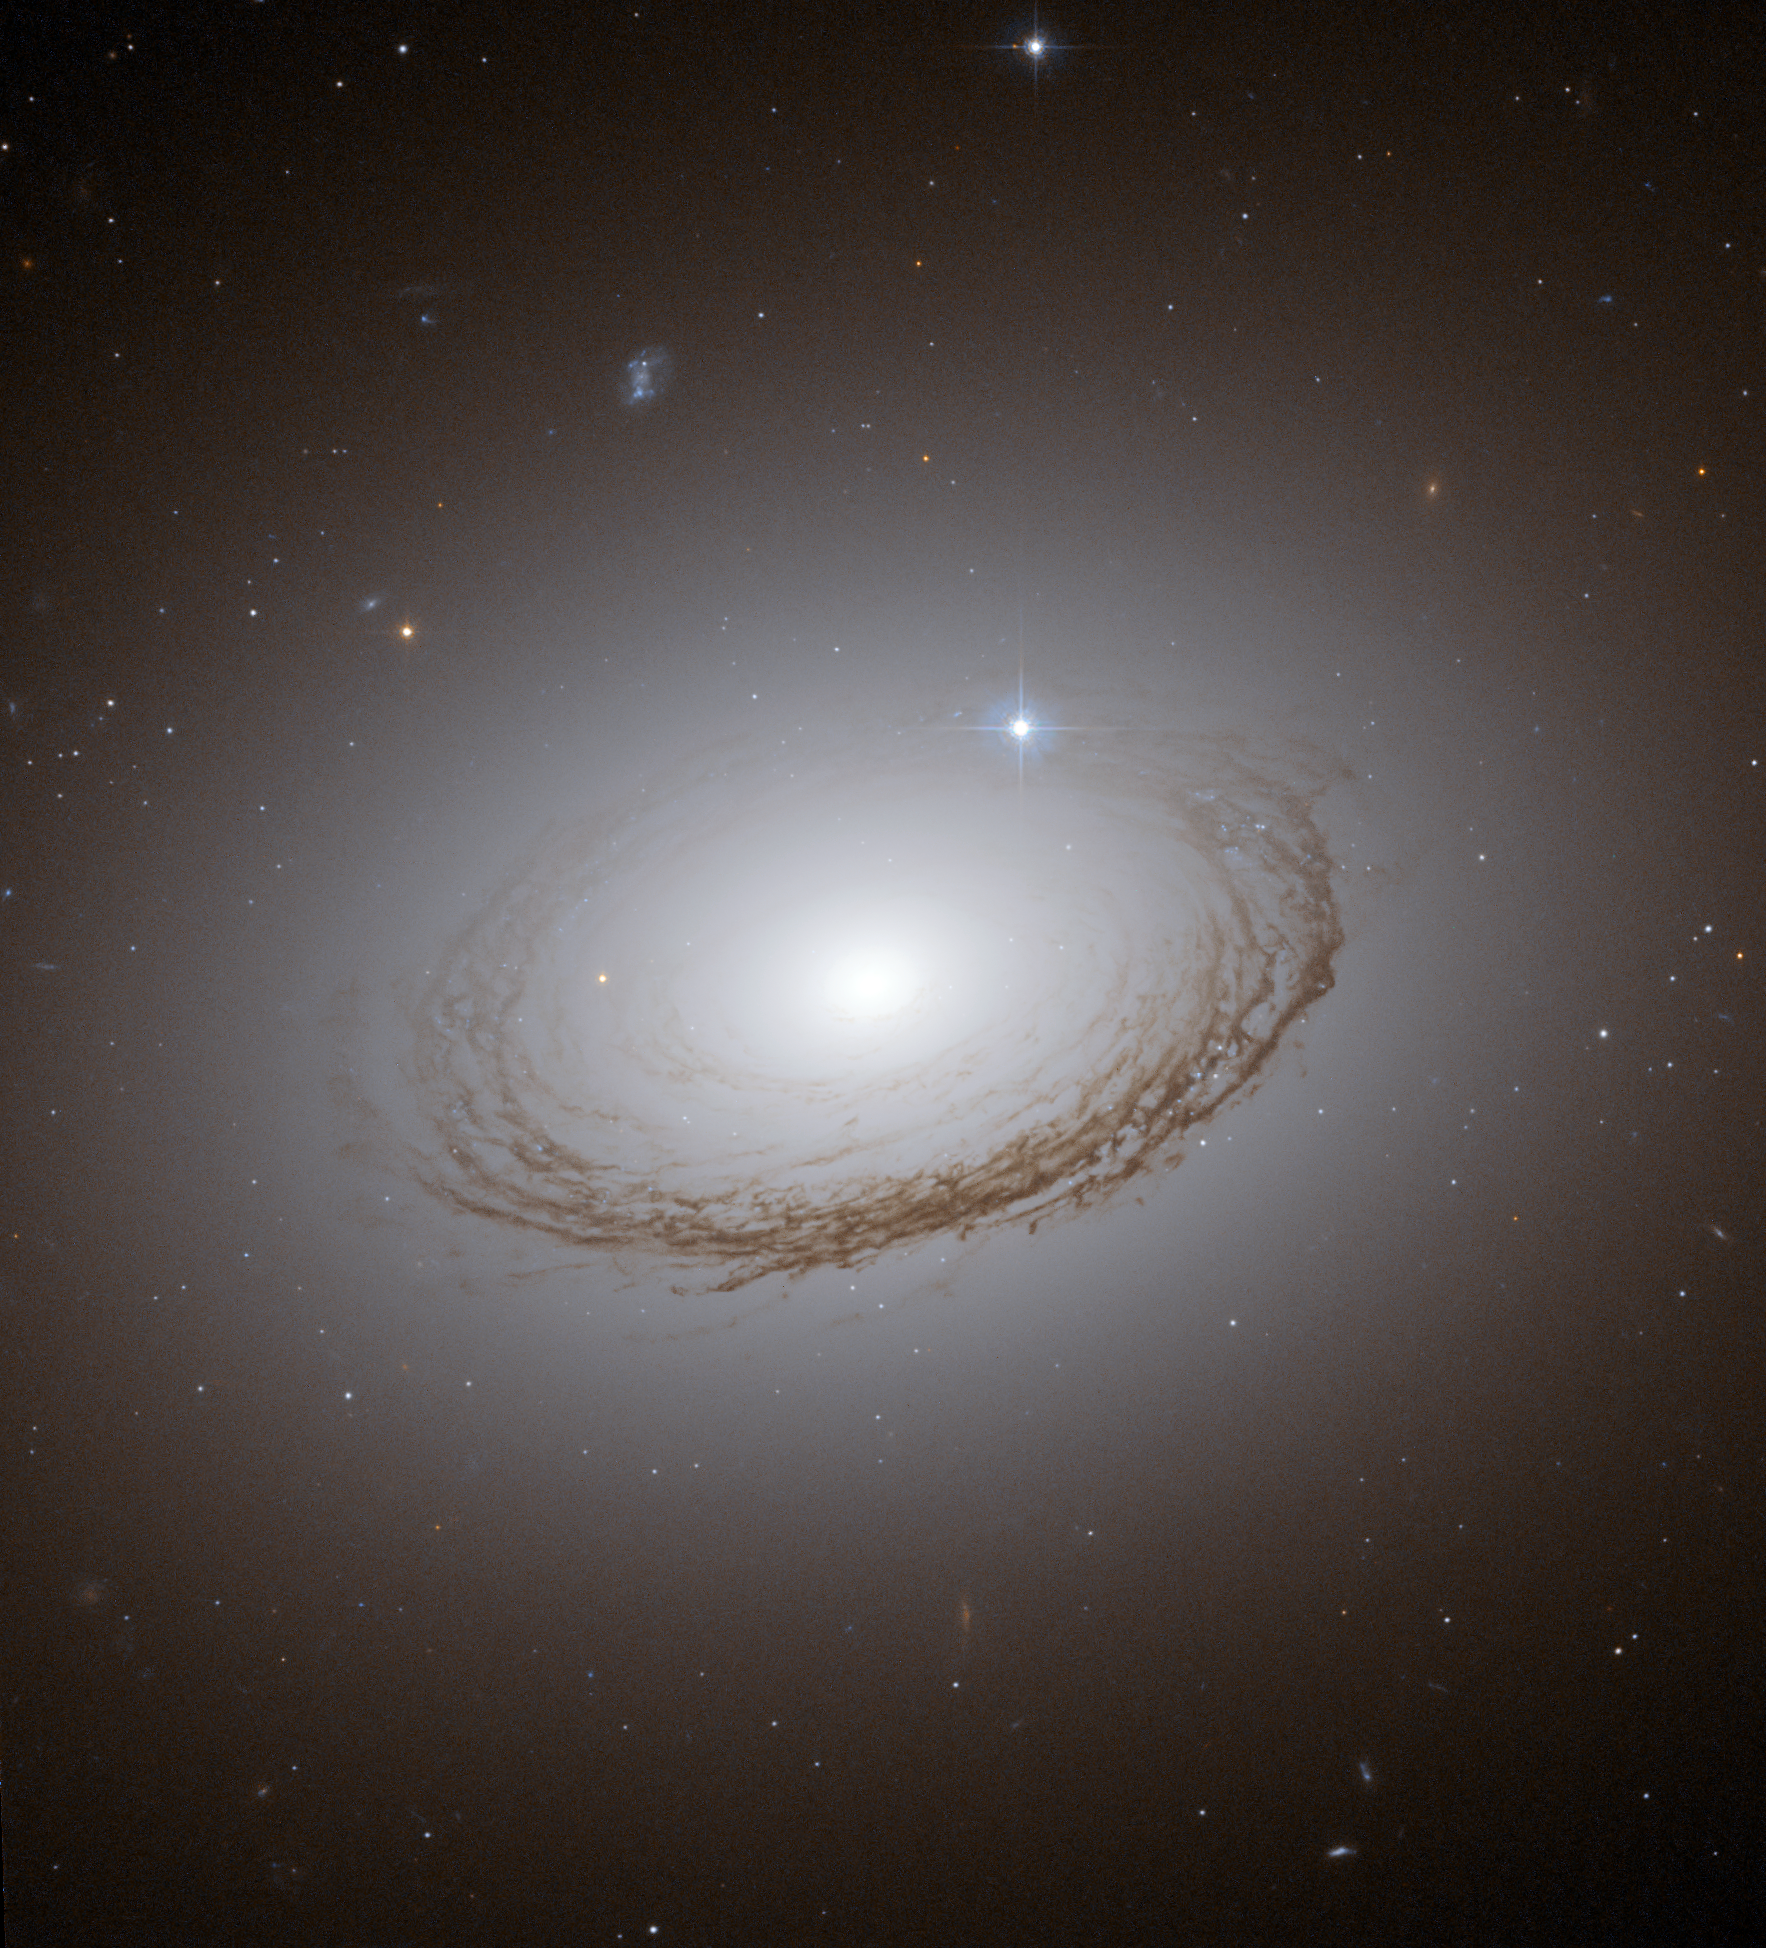

Dramatically backlit dust lanes in NGC 7049

The NASA/ESA Hubble Space Telescope captured this image of NGC 7049 in the constellation of Indus, in the southern sky. A family of globular clusters appears as glittering spots dusted around the galaxy halo. Astronomers study the globular clusters in NGC 7049 to learn more about its formation and evolution. The dust lanes, which appear as a lacy web, are dramatically backlit by the millions of stars in the halo of NGC 7049.

Credit: NASA, ESA and W. Harris (McMaster University, Ontario, Canada)